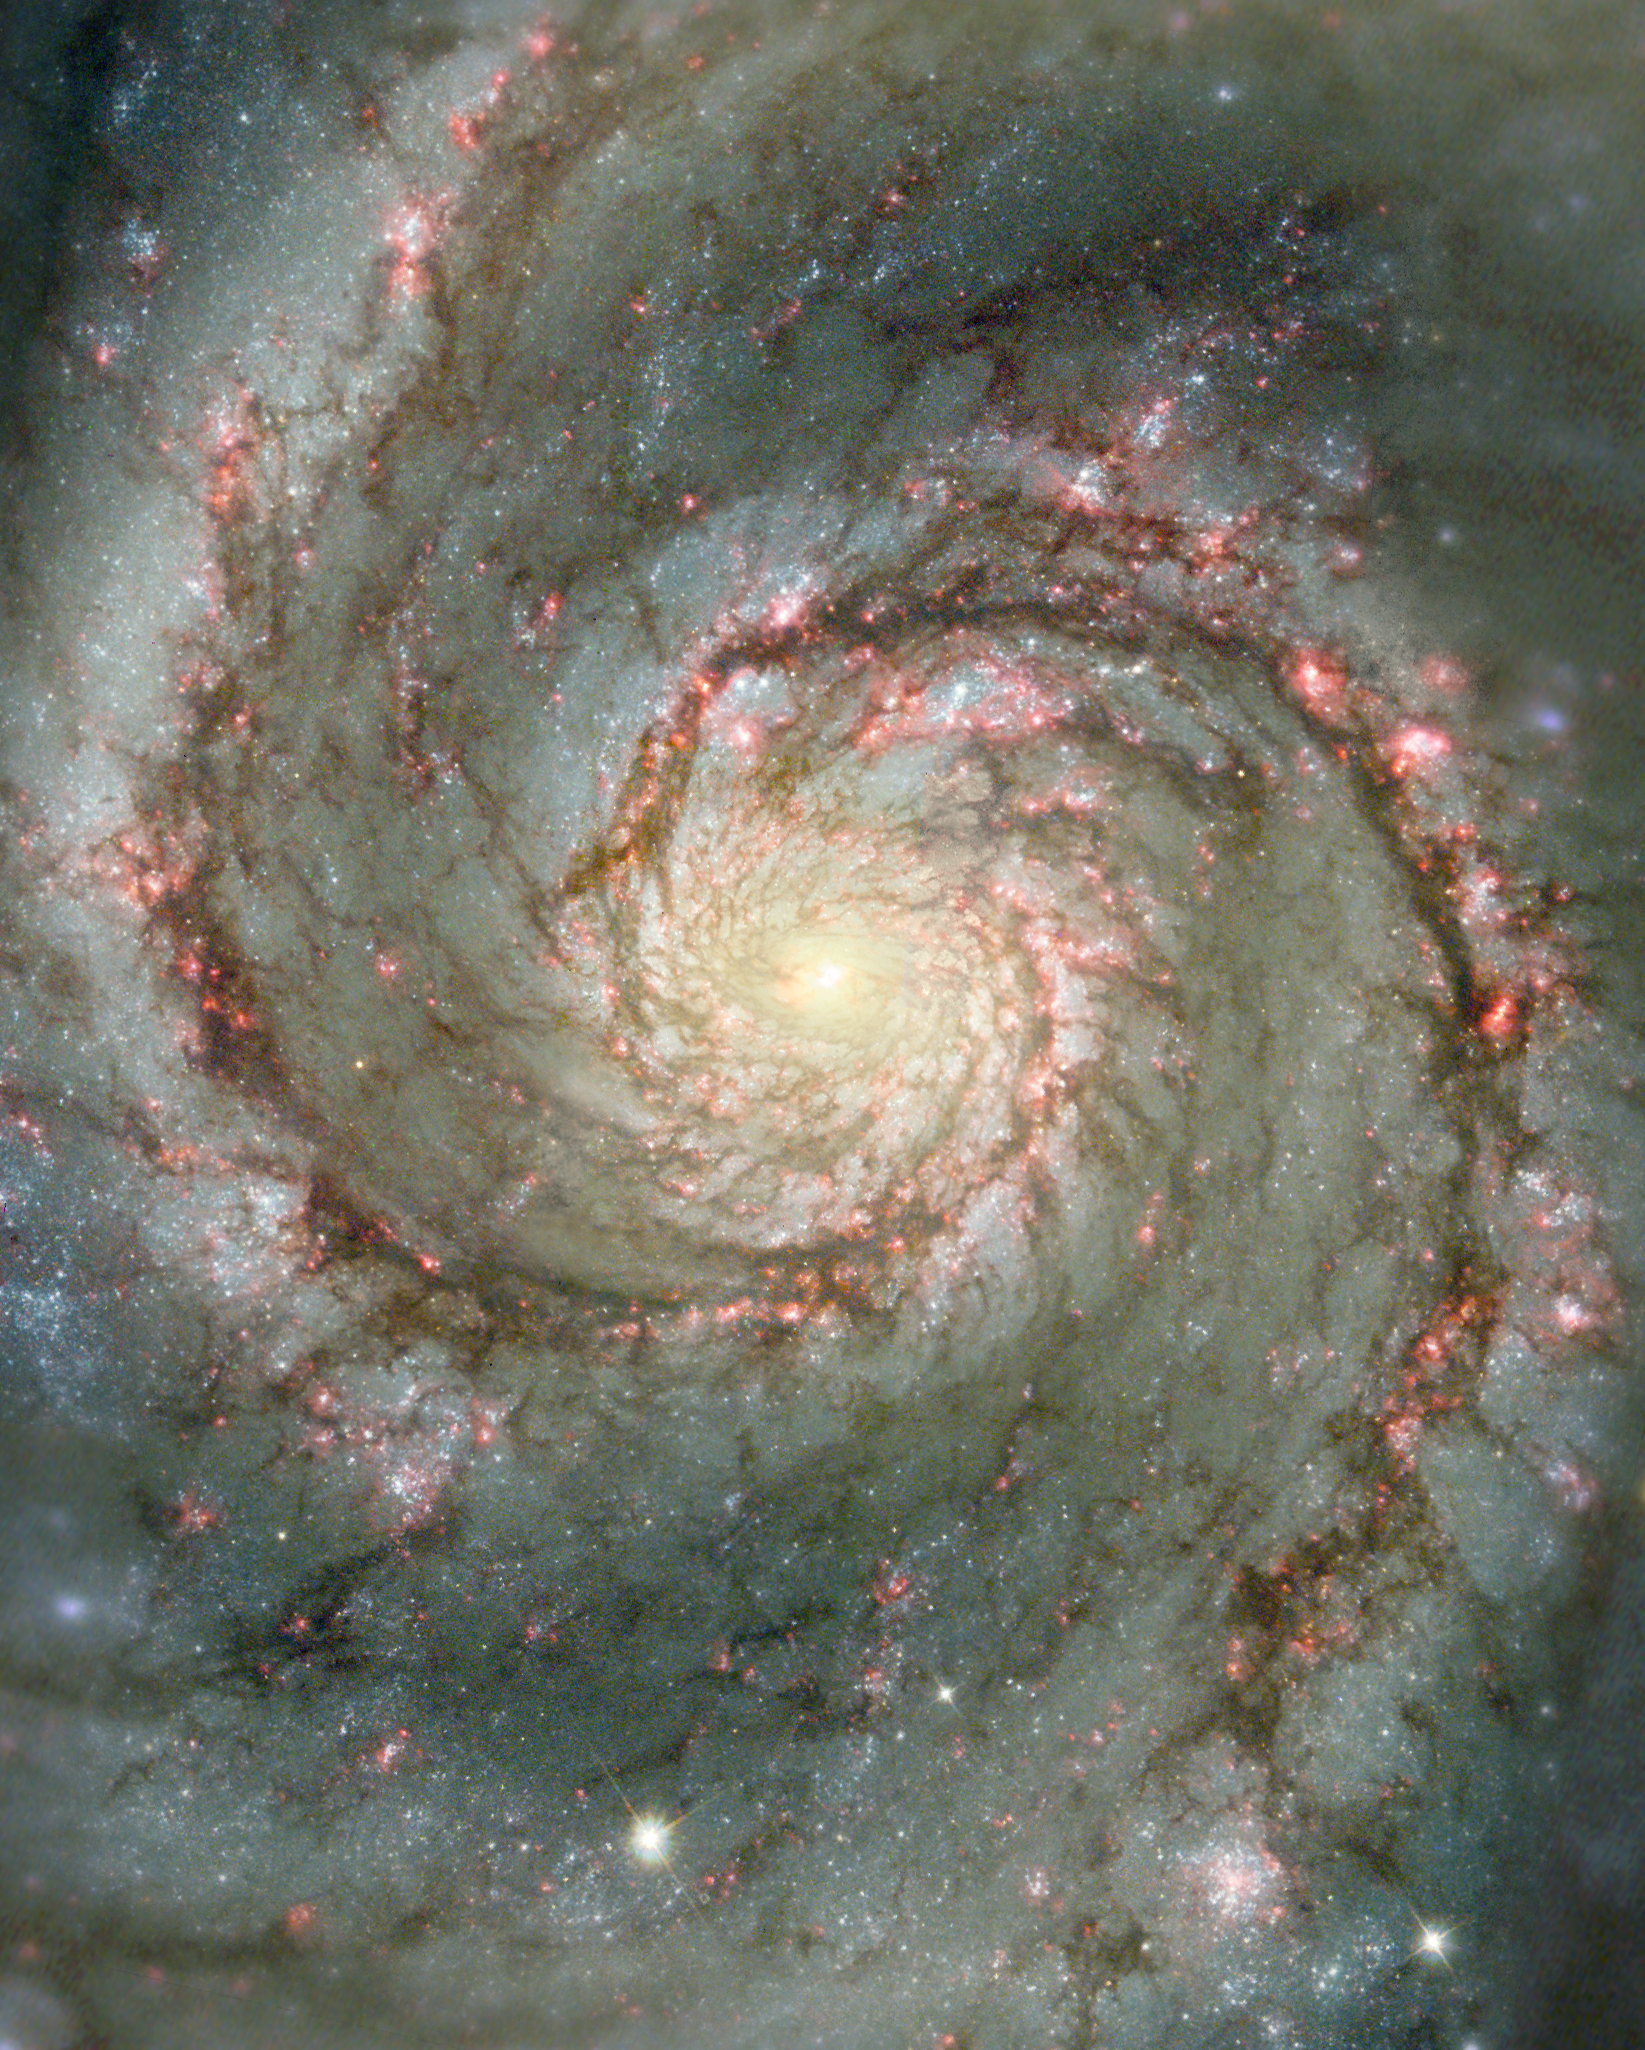

The Heart of the Whirlpool Galaxy

The Whirlpool galaxy, M51, has been one of the most photogenic galaxies in amateur and professional astronomy. Easily photographed and viewed by smaller telescopes, this celestial beauty is studied extensively in a range of wavelengths by large ground- and space-based observatories. This Hubble composite image shows visible starlight as well as light from the emission of glowing hydrogen, which is associated with the most luminous young stars in the spiral arms.

Credit: NASA/ESA and The Hubble Heritage Team STScI/AURA)